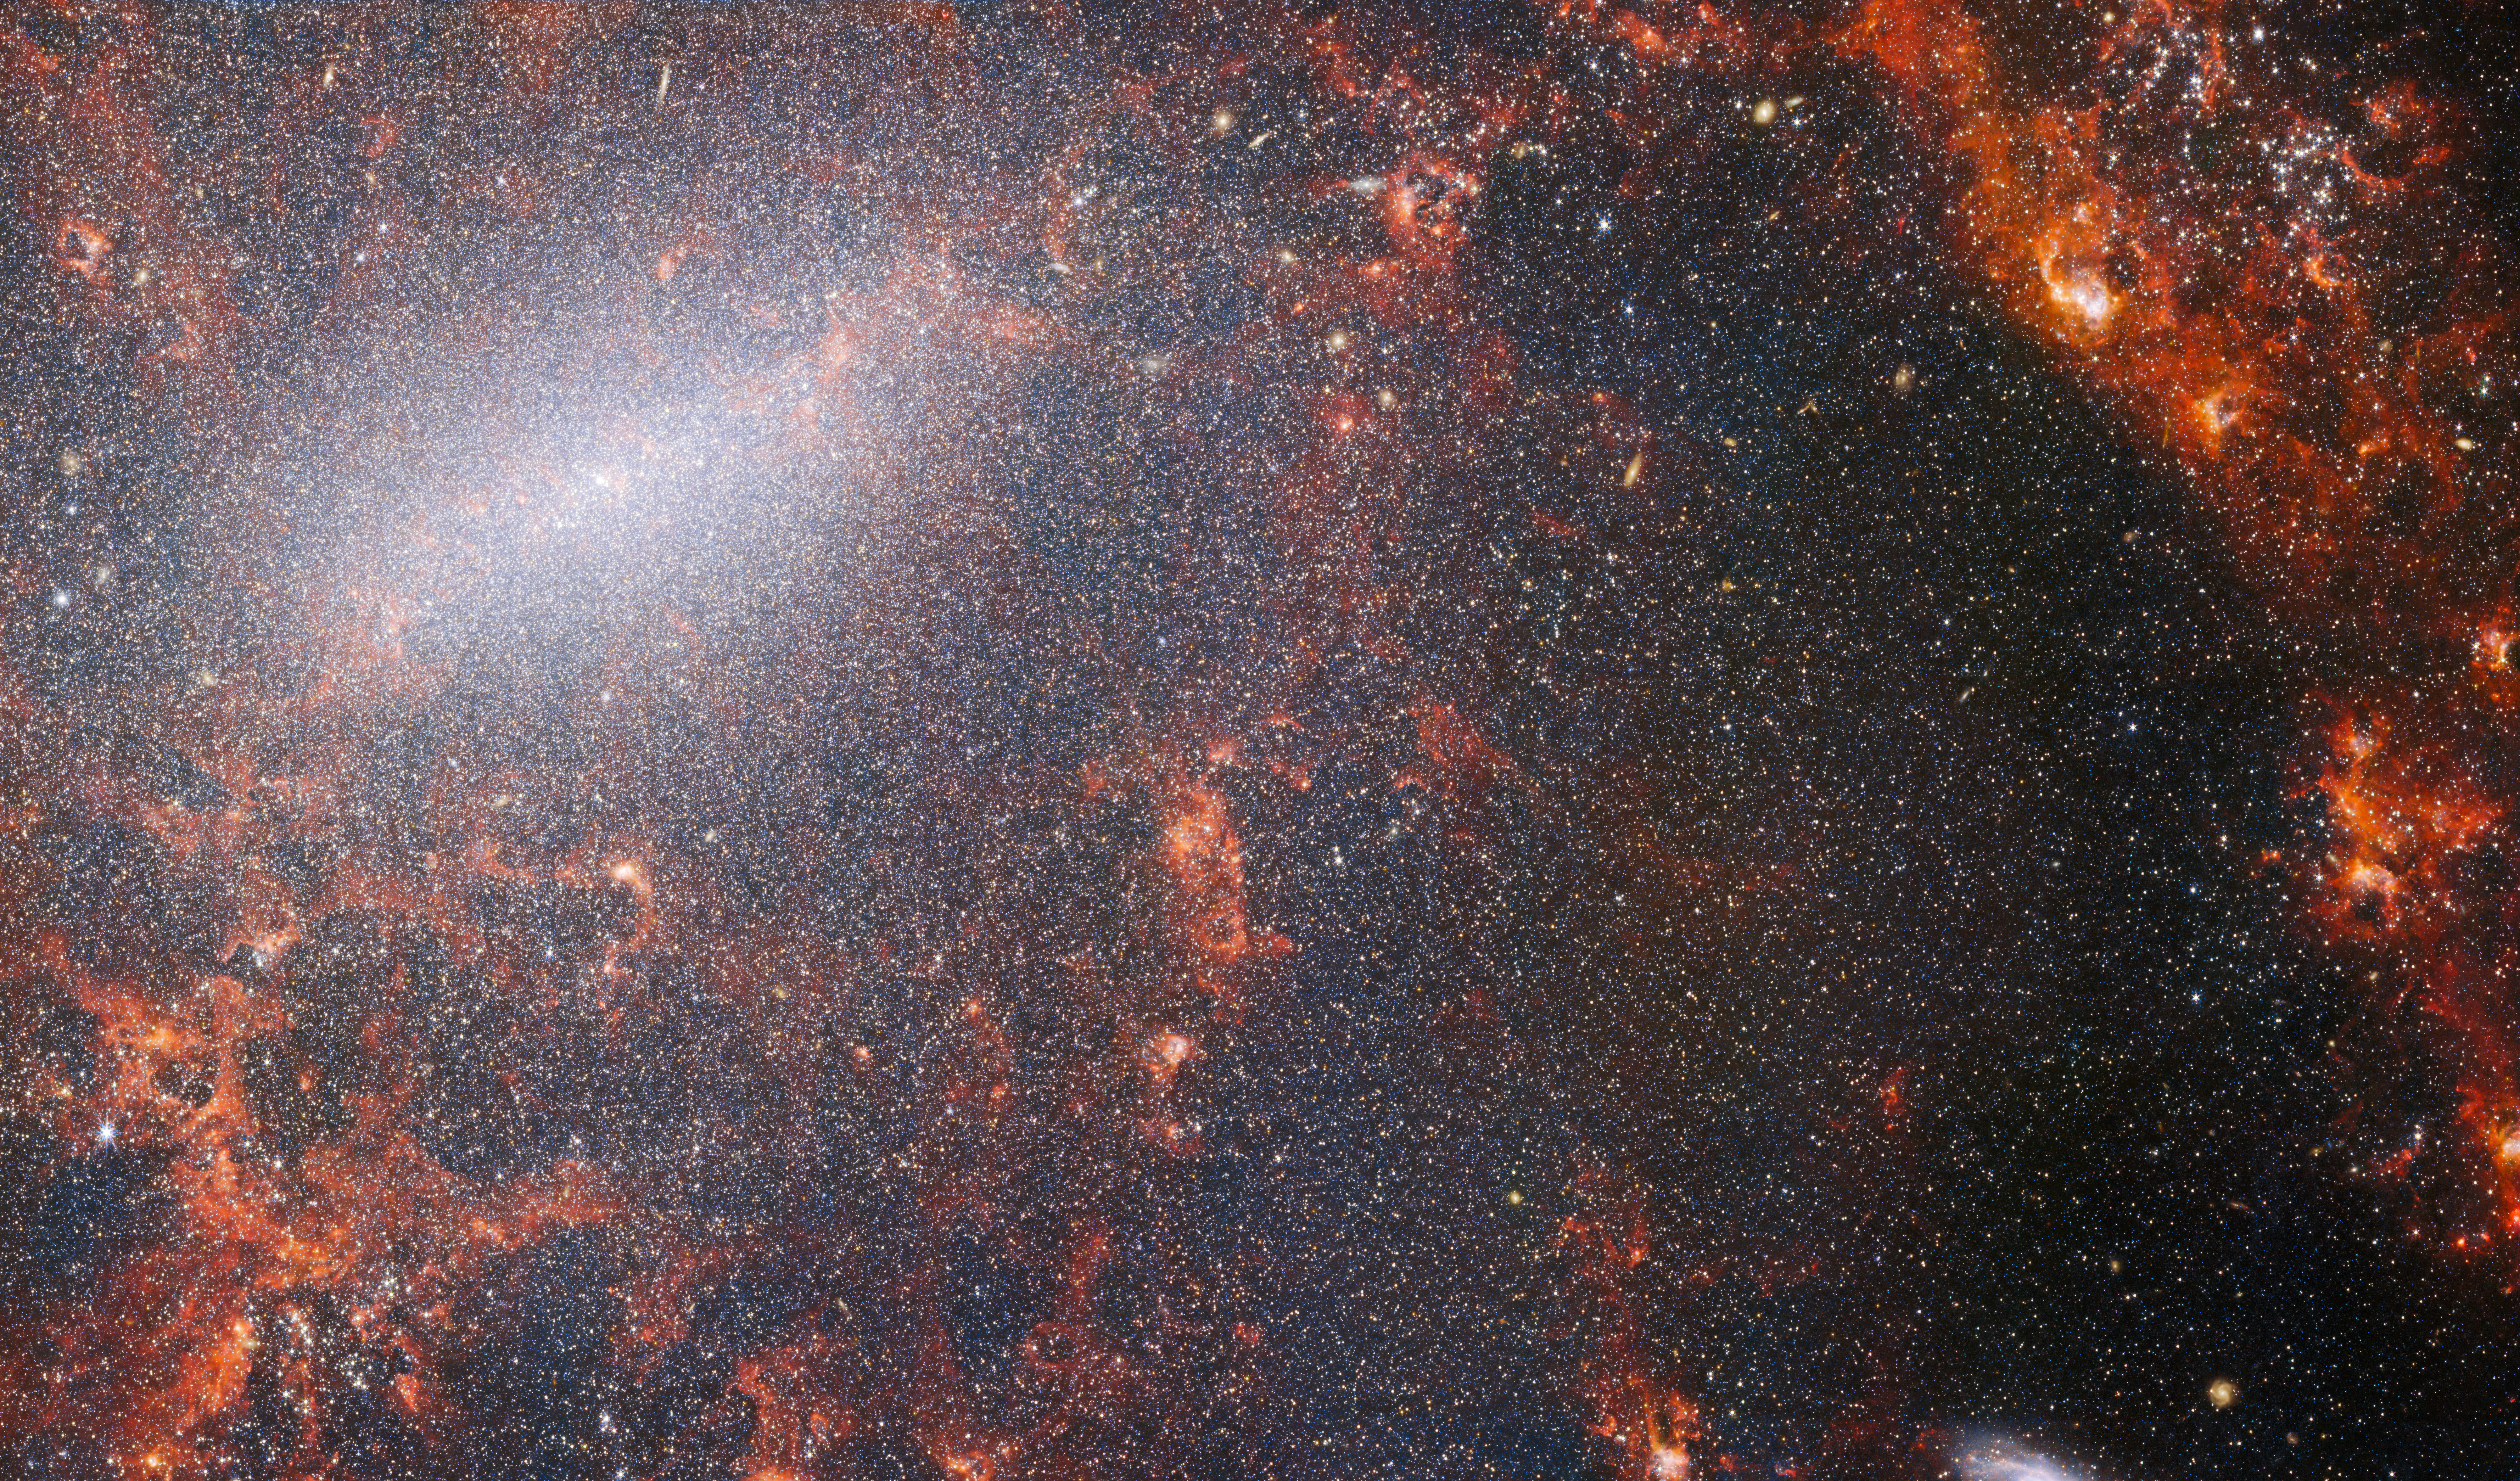

NGC 5068 (NIRCam image)

A delicate tracery of dust and bright star clusters threads across this image from the NASA/ESA/CSA James Webb Space Telescope. This view from Webb’s NIRCam instrument is studded by the galaxy’s massive population of stars, most dense along its bright central bar, along with burning red clouds of gas illuminated by young stars within. These glittering stars belong to the barred spiral galaxy NGC 5068, located around 17 million light-years from Earth in the constellation Virgo.

Learn more about this image here.

Credit: ESA/Webb, NASA & CSA, J. Lee and the PHANGS-JWST Team